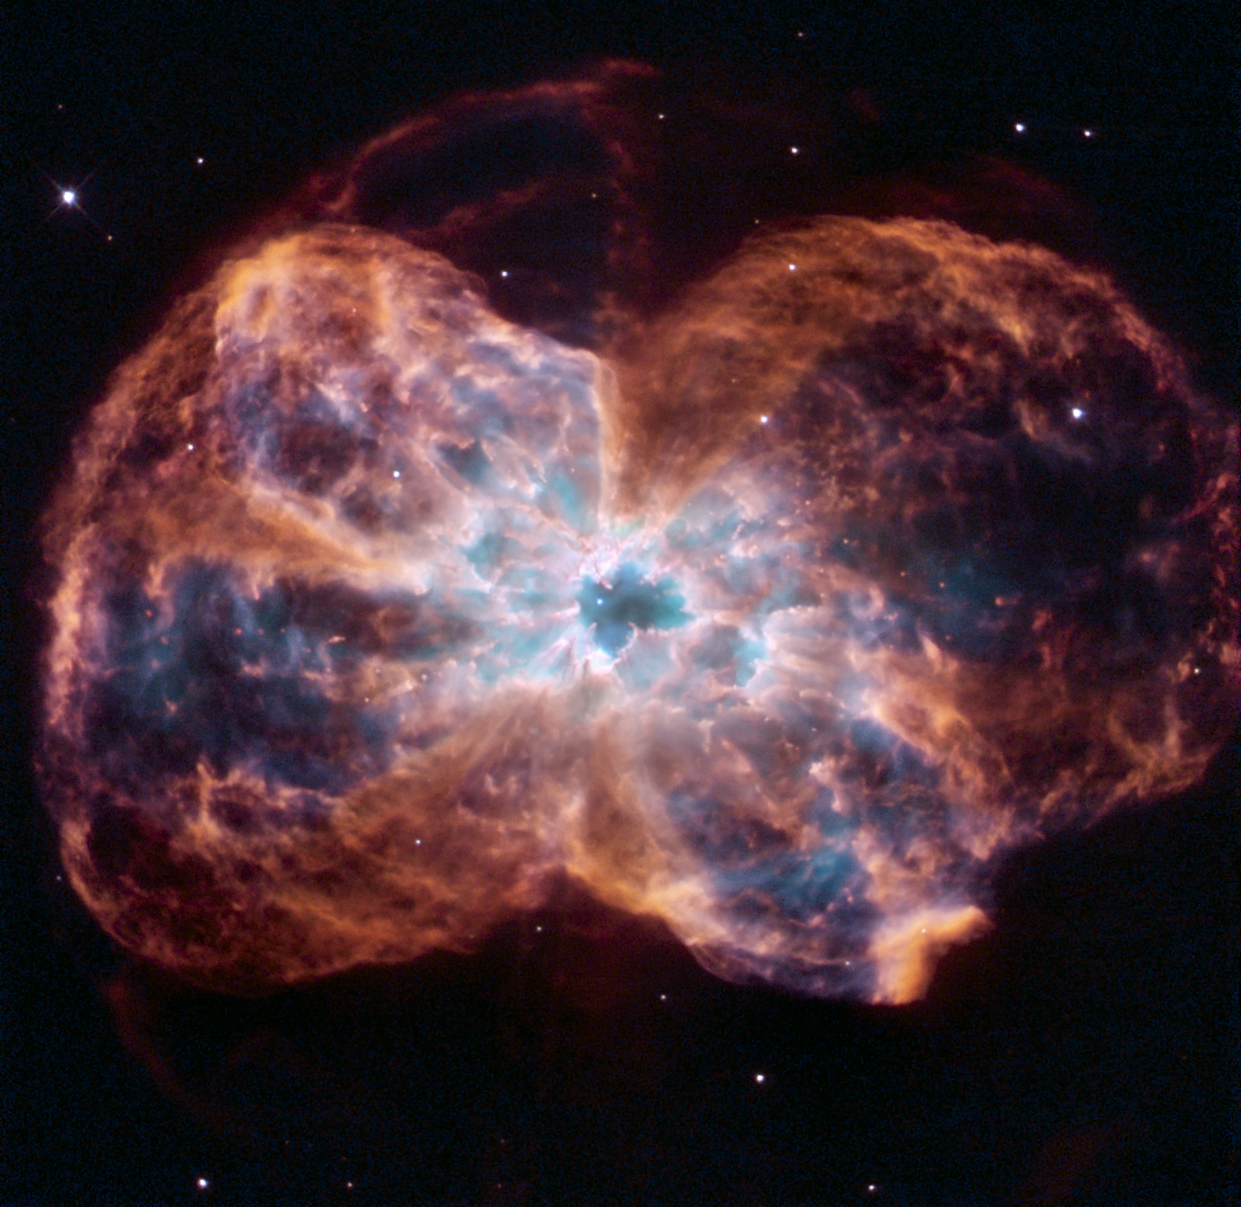

Hubble reveals NGC 2440

This image of NGC 2440 shows the colourful "last hurrah" of a star like our Sun. The star is ending its life by casting off its outer layers of gas, which formed a cocoon around the star's remaining core. Ultraviolet light from the dying star makes the material glow. The burned-out star, called a white dwarf, is the white dot in the centre.

Credit: NASA, ESA, and K. Noll (STScI)